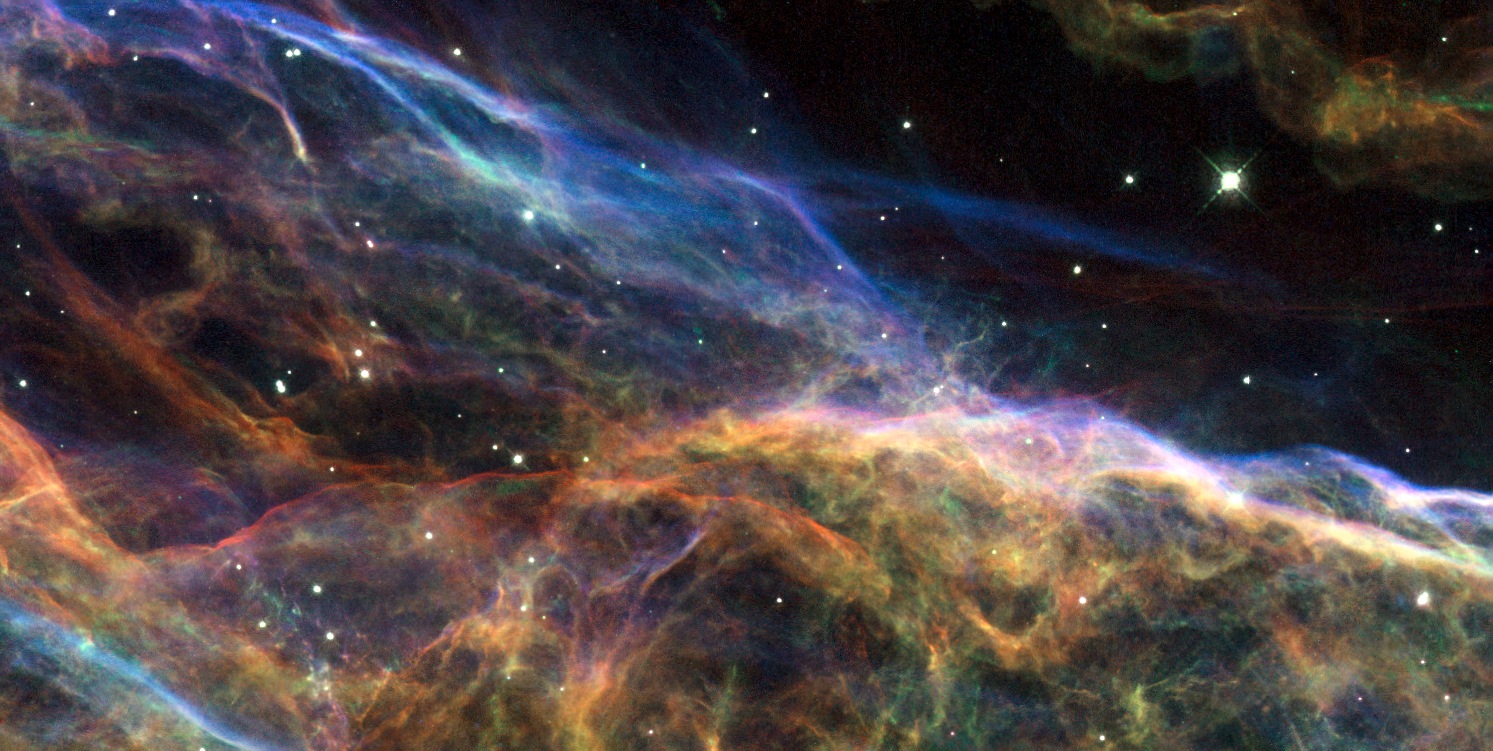

Uncovering the Veil Nebula

This image shows a small portion of the Veil Nebula - the shattered remains of a supernova that exploded some 5-10,000 years ago. The intertwined rope-like filaments of gas result from the enormous amounts of energy released as the fast-moving debris from the explosion ploughs into its surroundings and creates shock fronts. These shocks, driven by debris moving at 600,000 kilometres per hour, heat the gas to millions of degrees. It is the subsequent cooling of this material that produces the brilliantly coloured glows.

This portion of the Veil Nebula is located in a magnificent part of the Veil known as the Witch's Broom Nebula to the east (to the right in the overview image). The entire structure spans about 3 degrees, corresponding to about 6 full moons. The bright blue star - dubbed 52 Cygni and unrelated to the supernova explosion - can be observed with the naked eye on a clear summer's night.

The image was taken with the Wide Field and Planetary Camera 2 (WFPC2) on board the Hubble Space Telescope. The colour is produced by composite of three different images. The different colours indicate emission from different kinds of atoms excited by the shock: blue shows oxygen, green shows sulphur, and red shows hydrogen.

Credit: NASA, ESA, and the Hubble Heritage (STScI/AURA)-ESA/Hubble Collaboration. Acknowledgment: J. Hester (Arizona State University)